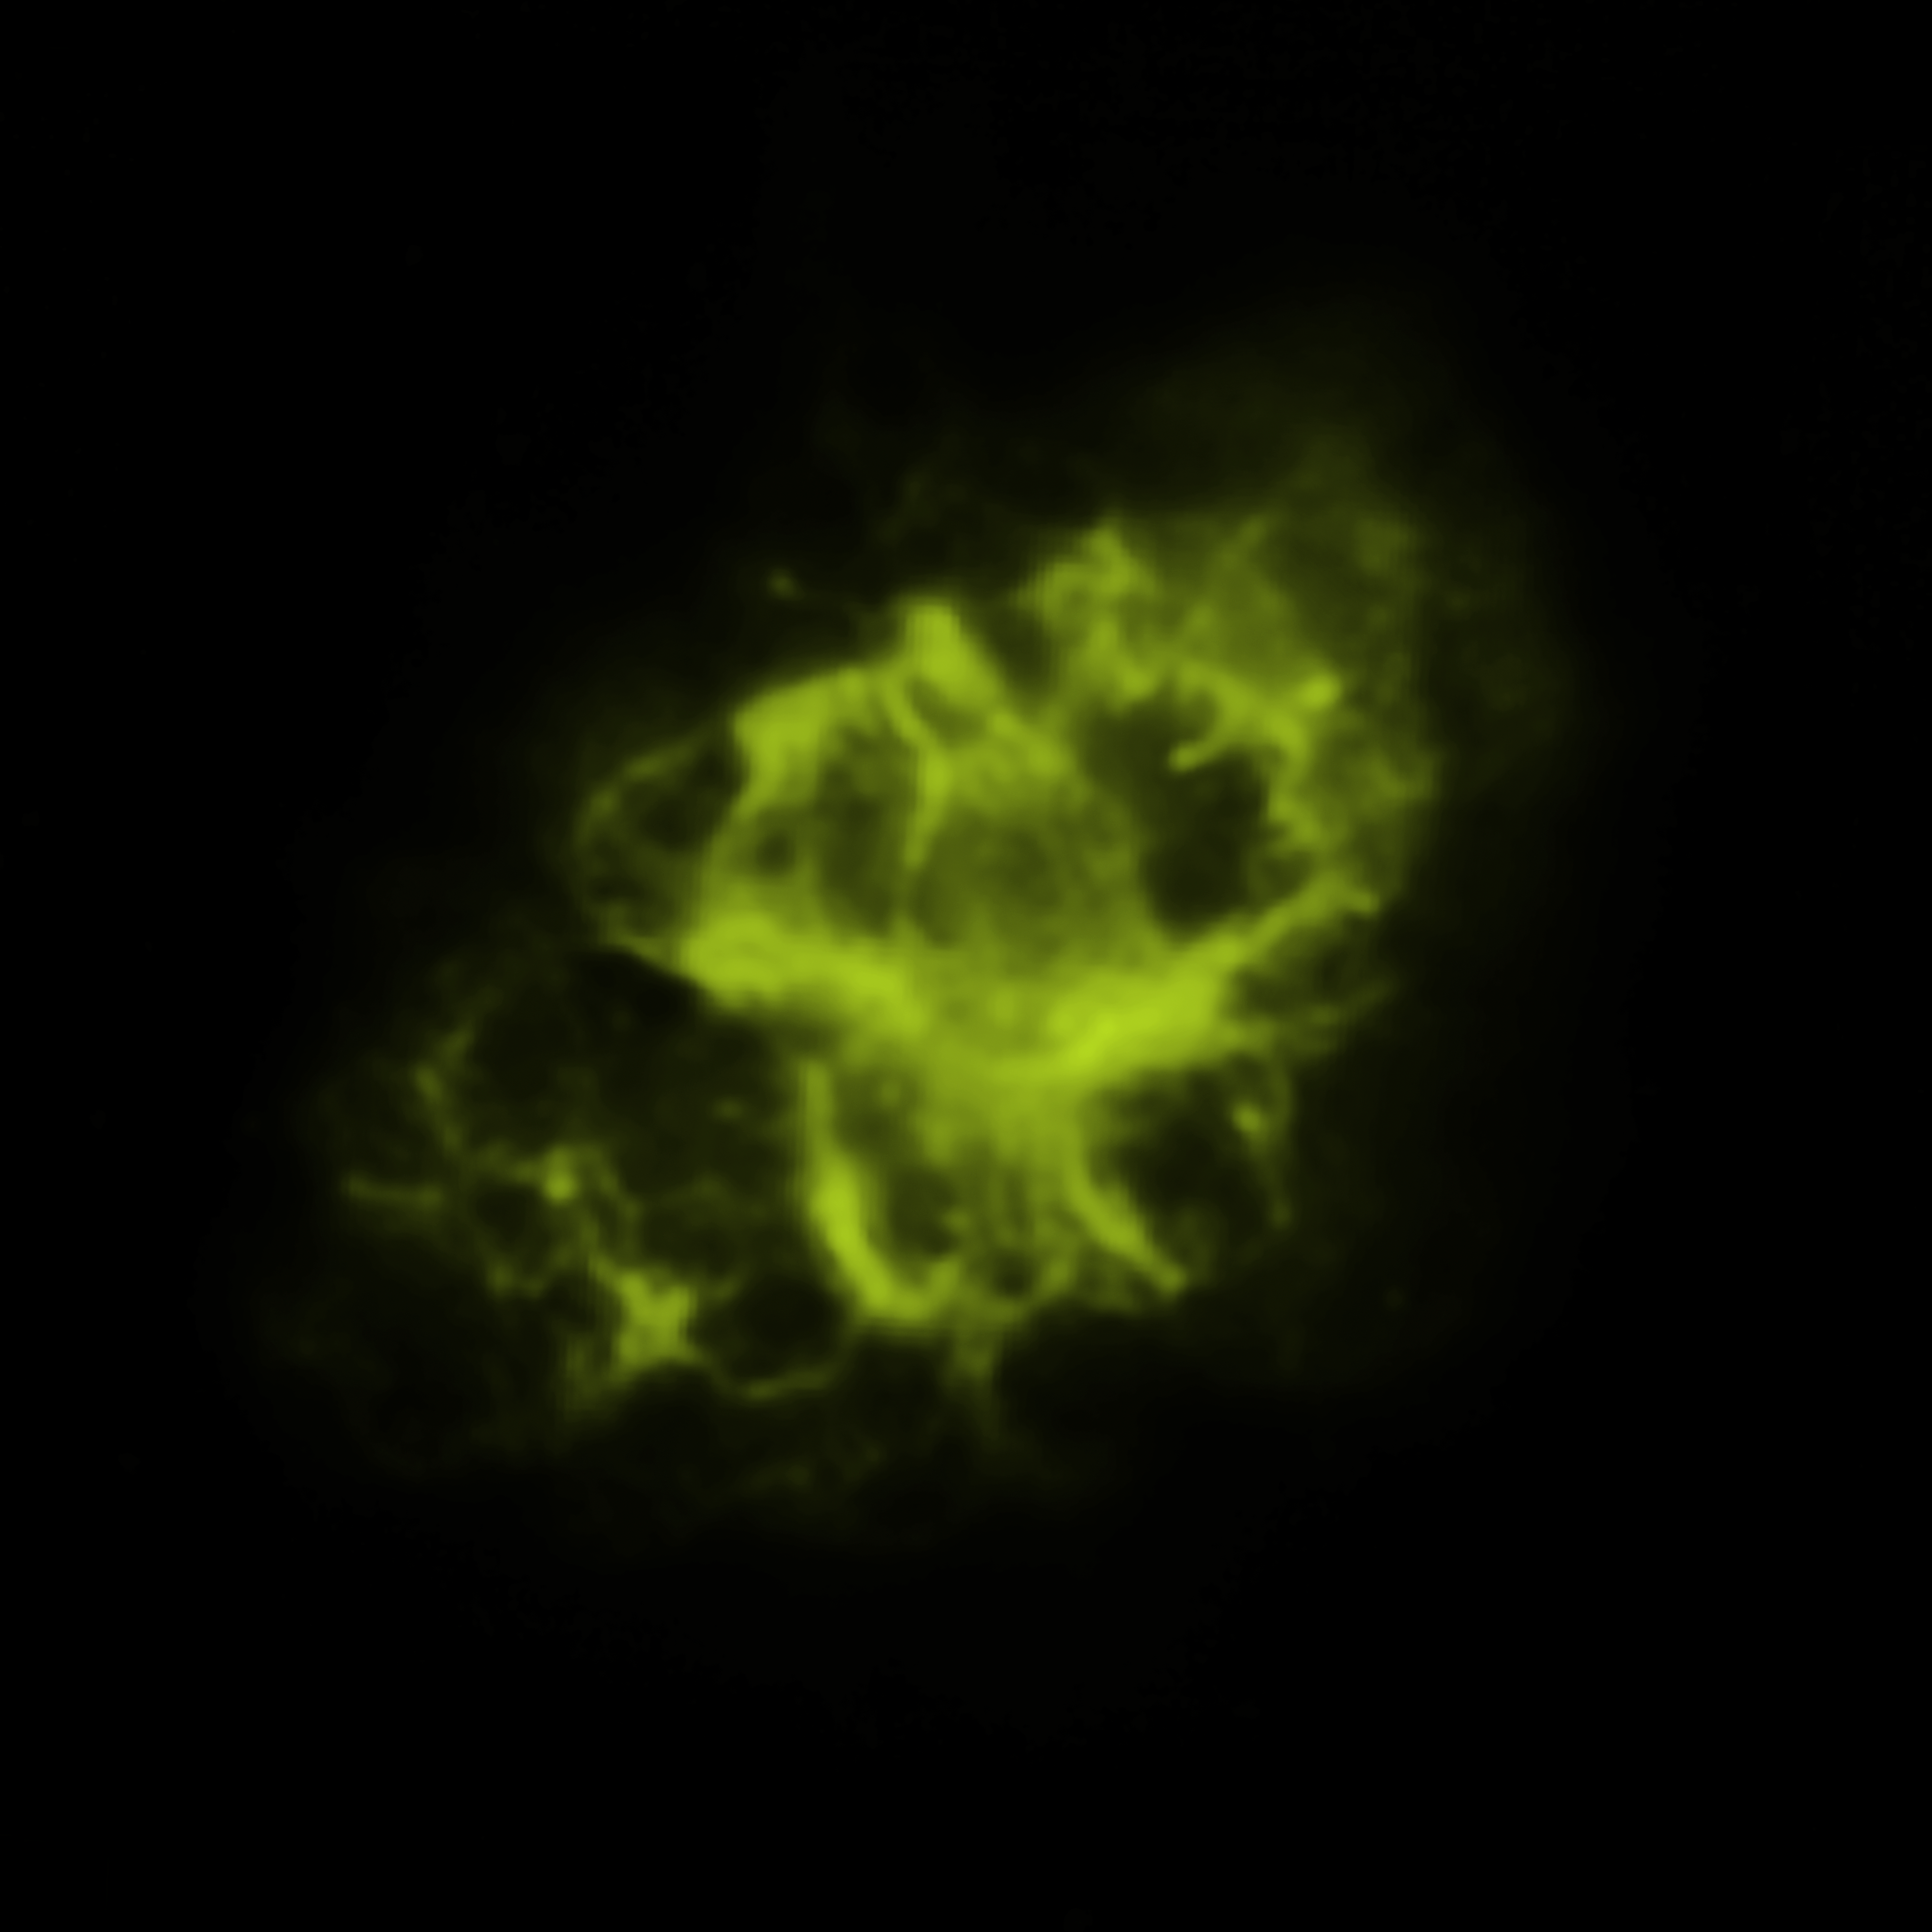

Spitzer Space Telescope (infrared) Image of the Crab Nebula

NASA’s Spitzer Space Telescope observed the Crab Nebula, a supernova remnant located 6500 light-years from Earth, in the infrared.

Credit: JPL/Caltech